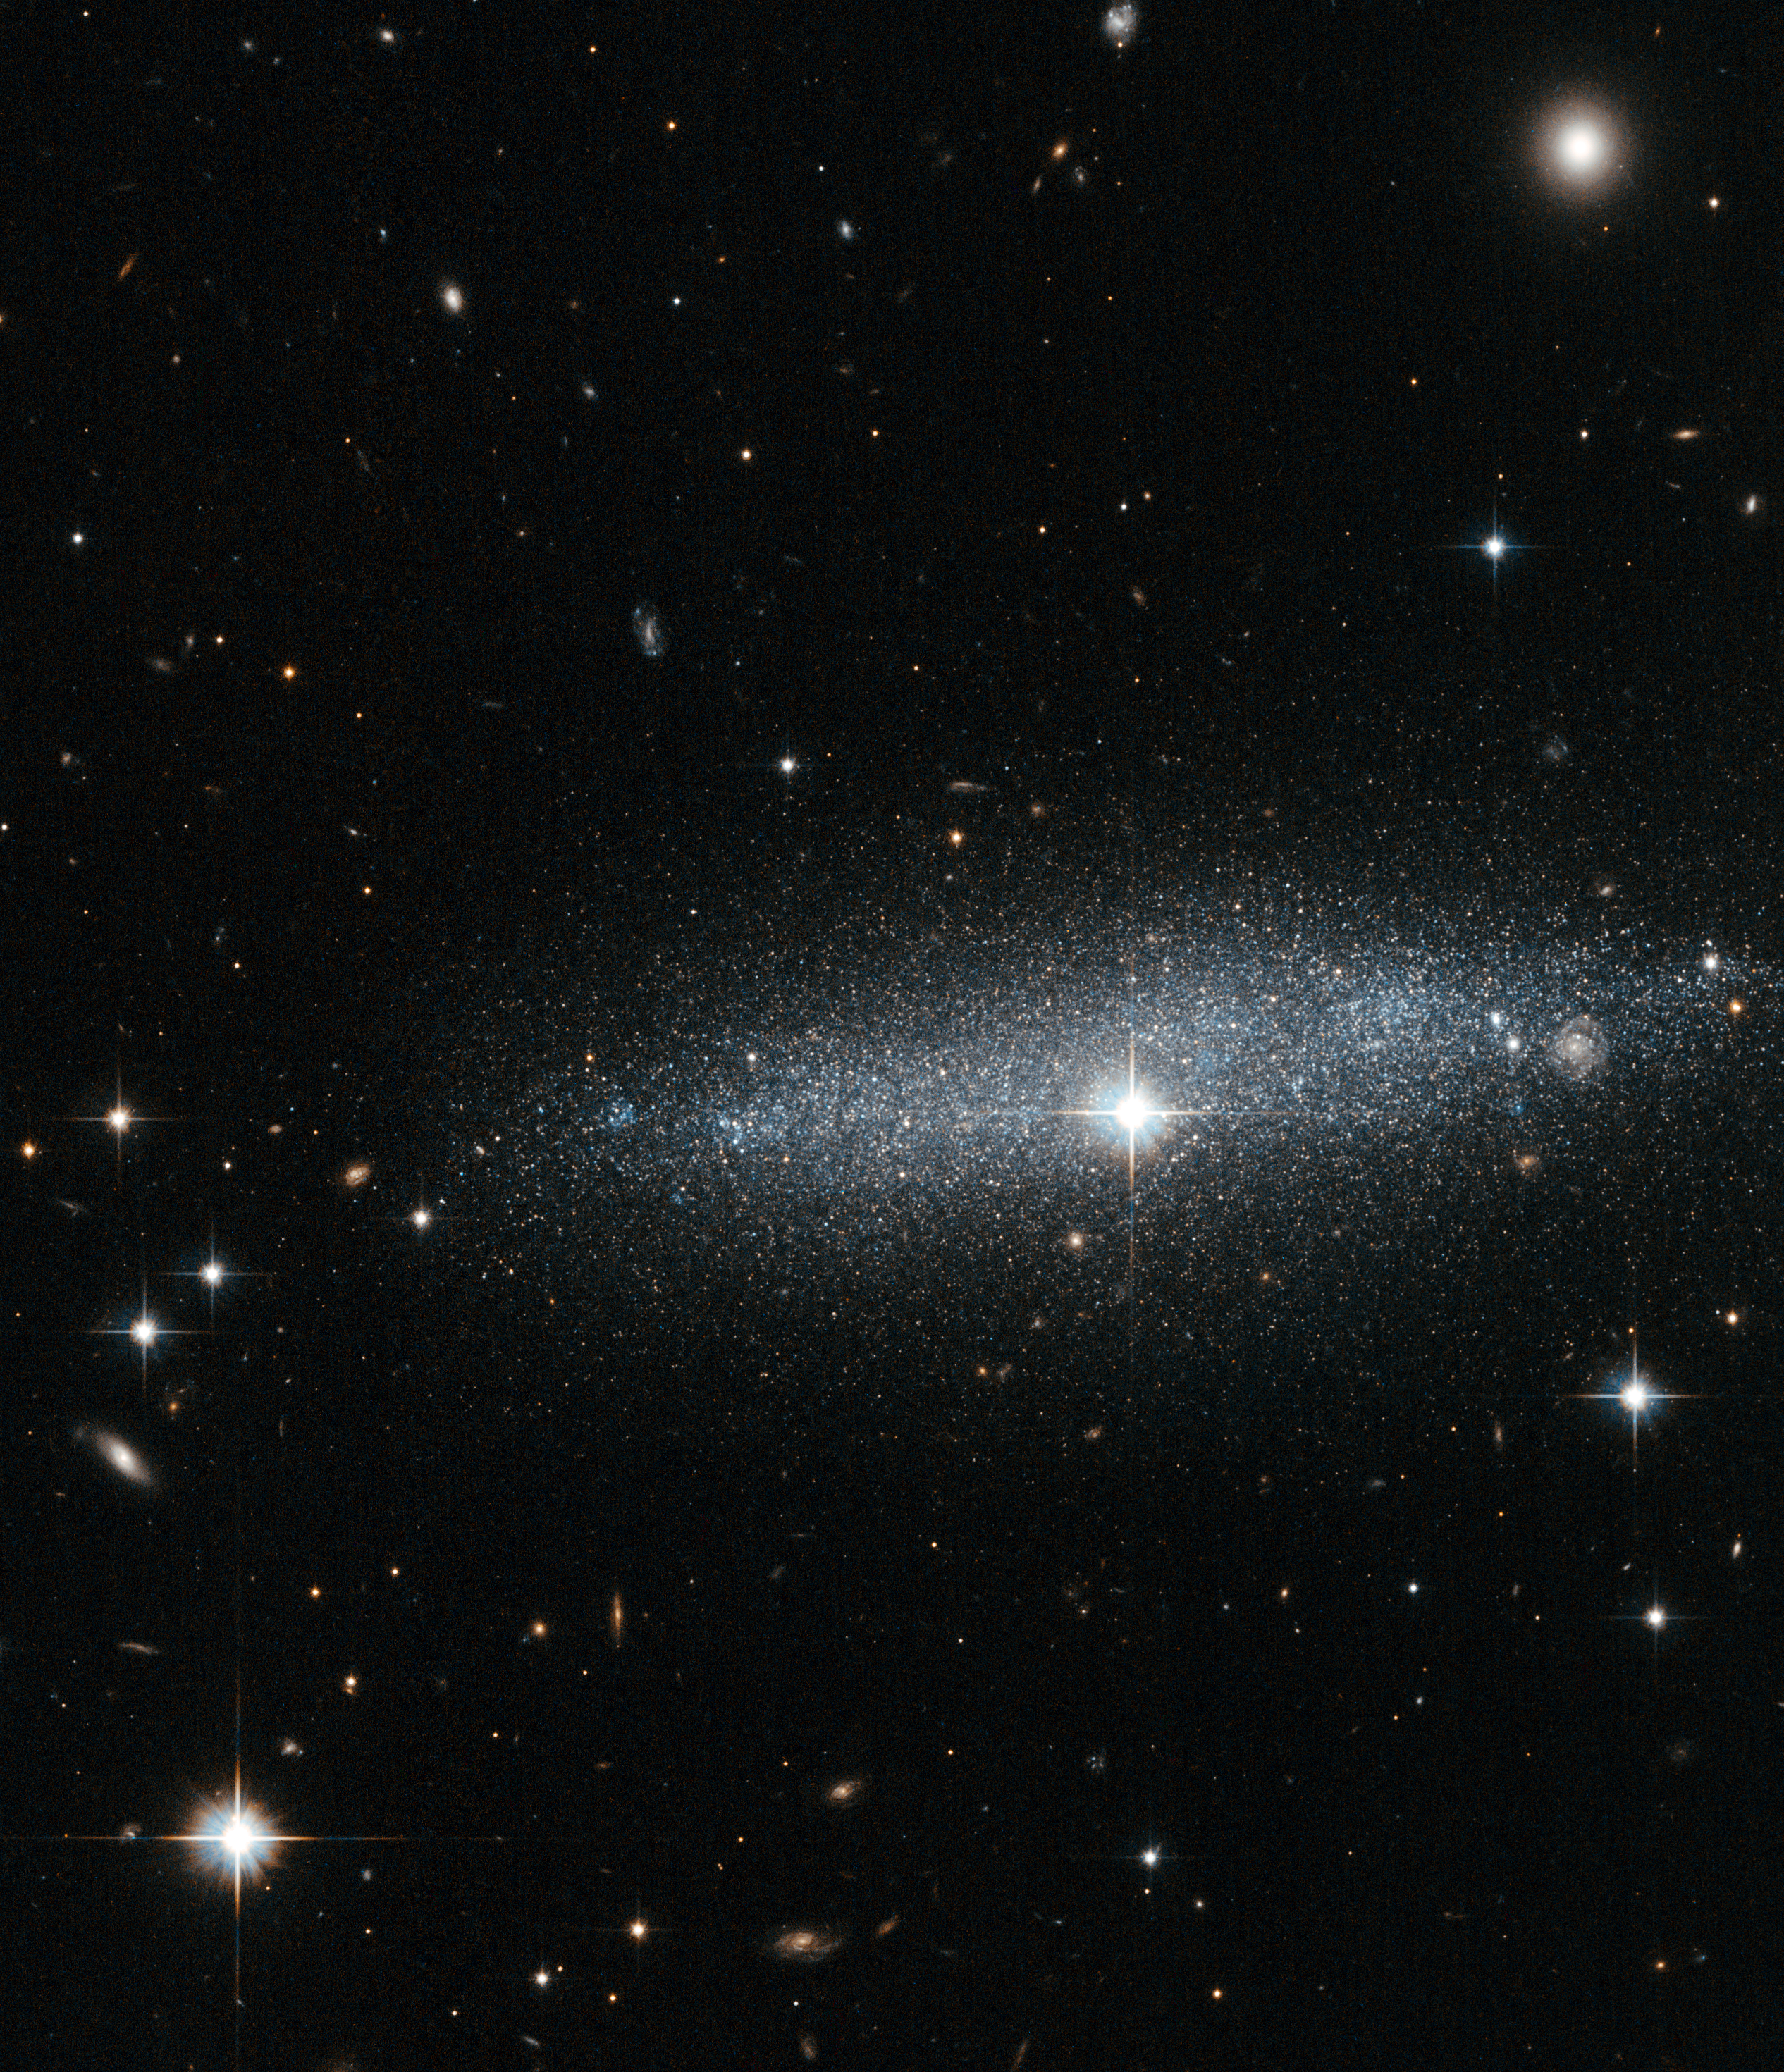

Glitter galaxy — An edge-on view of the ESO 318-13 galaxy

The brilliant cascade of stars through the middle of this image is the galaxy ESO 318-13 as seen by the NASA/ESA Hubble Space Telescope. Despite being located millions of light-years from Earth, the stars captured in this image are so bright and clear you could almost attempt to count them.

Although ESO 318-13 is the main event in this image, it is sandwiched between a vast collection of bright celestial objects. Several stars near and far dazzle in comparison to the neat dusting contained within the galaxy. One that particularly stands out is located near the centre of the image, and looks like an extremely bright star located within the galaxy. This is, however, a trick of perspective. The star is located in the Milky Way, our own galaxy, and it shines so brightly because it is so much closer to us than ESO 318-13.

There are also a number of tiny glowing discs scattered throughout the frame that are more distant galaxies. In the top right corner, an elliptical galaxy can be clearly seen, a galaxy which is much larger but more distant than ESO 318-13. More interestingly, peeking through the ESO 318-13, near the right-hand edge of the image, is a distant spiral galaxy.

Galaxies are largely made up of empty space; the stars within them only take up a small volume, and providing a galaxy is not too dusty, it can be largely transparent to light coming from the background. This makes overlapping galaxies like these quite common. One particularly dramatic example of this phenomenon is the galaxy pair NGC 3314 (heic1208).

Credit: ESA/Hubble & NASA